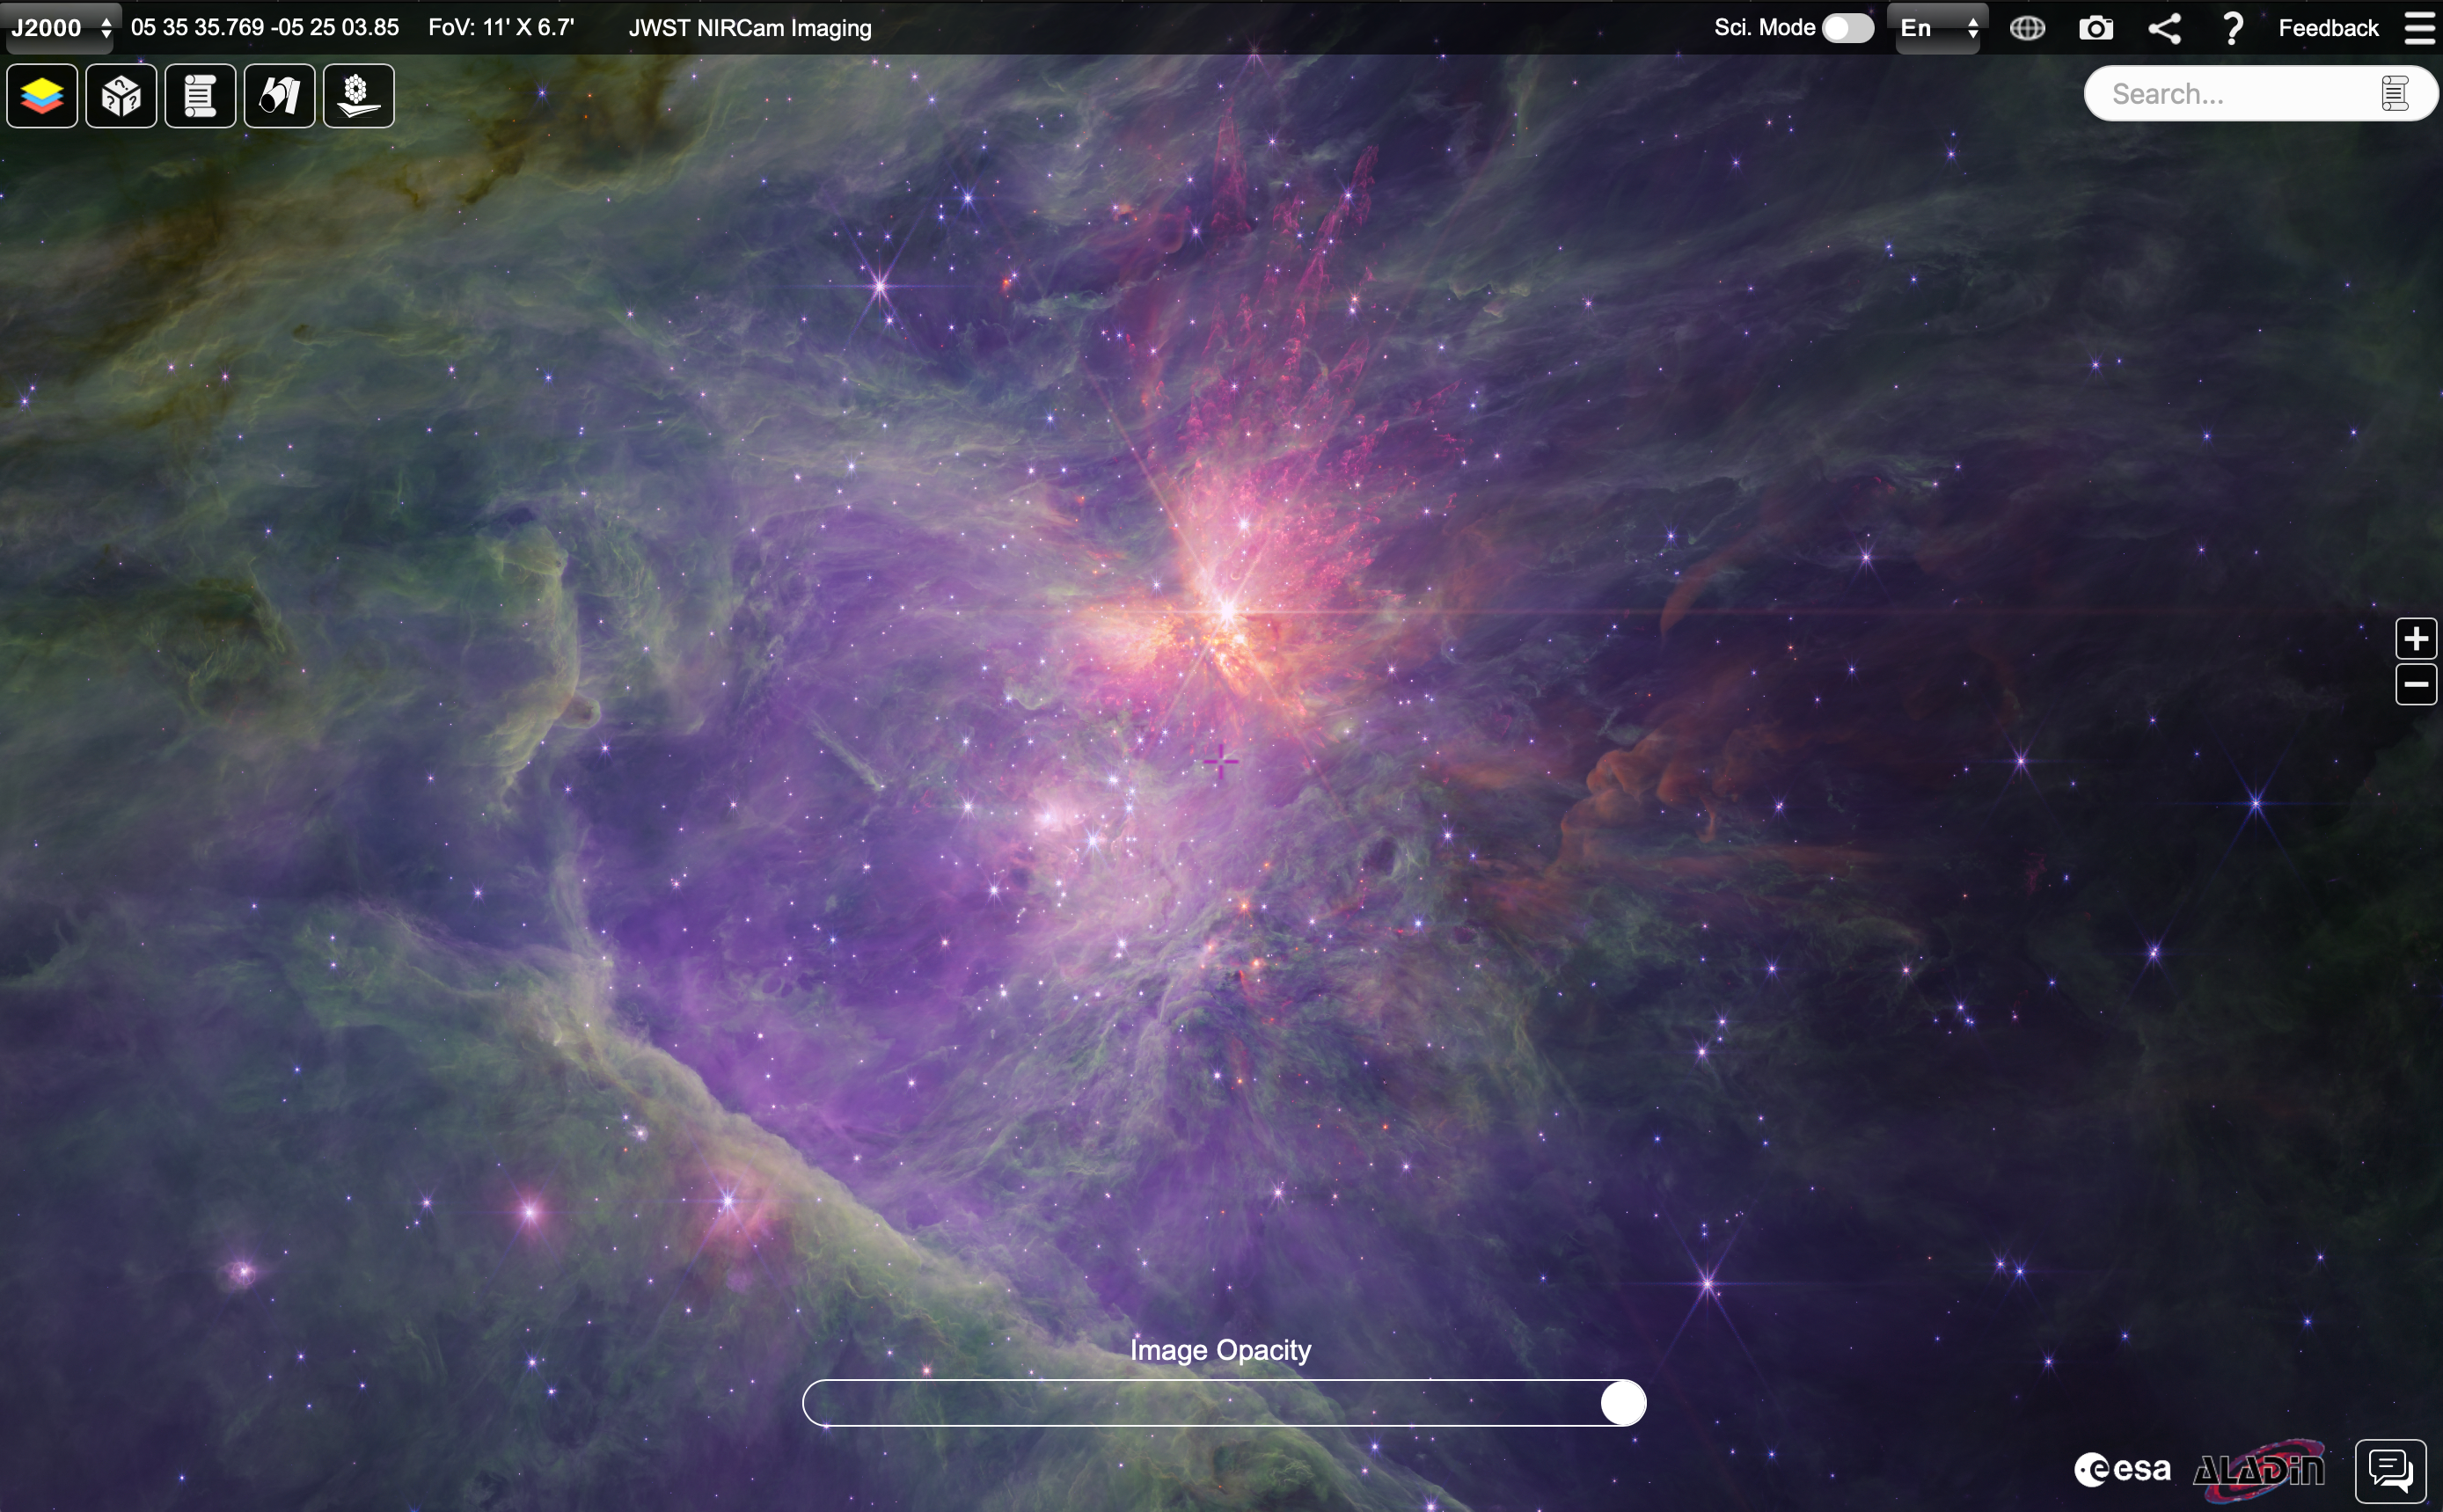

Long-wavelength NIRCam Orion mosaic in ESASky

This image shows a long-wavelength NIRCam mosaic of the inner Orion Nebula and Trapezium Cluster in the ESA Sky platform. The full image on ESA Sky measures 10,446 x 7,109 pixels and can be viewed here.

Credit: NASA, ESA, CSAScience leads and image processing: M. McCaughrean, S. Pearson